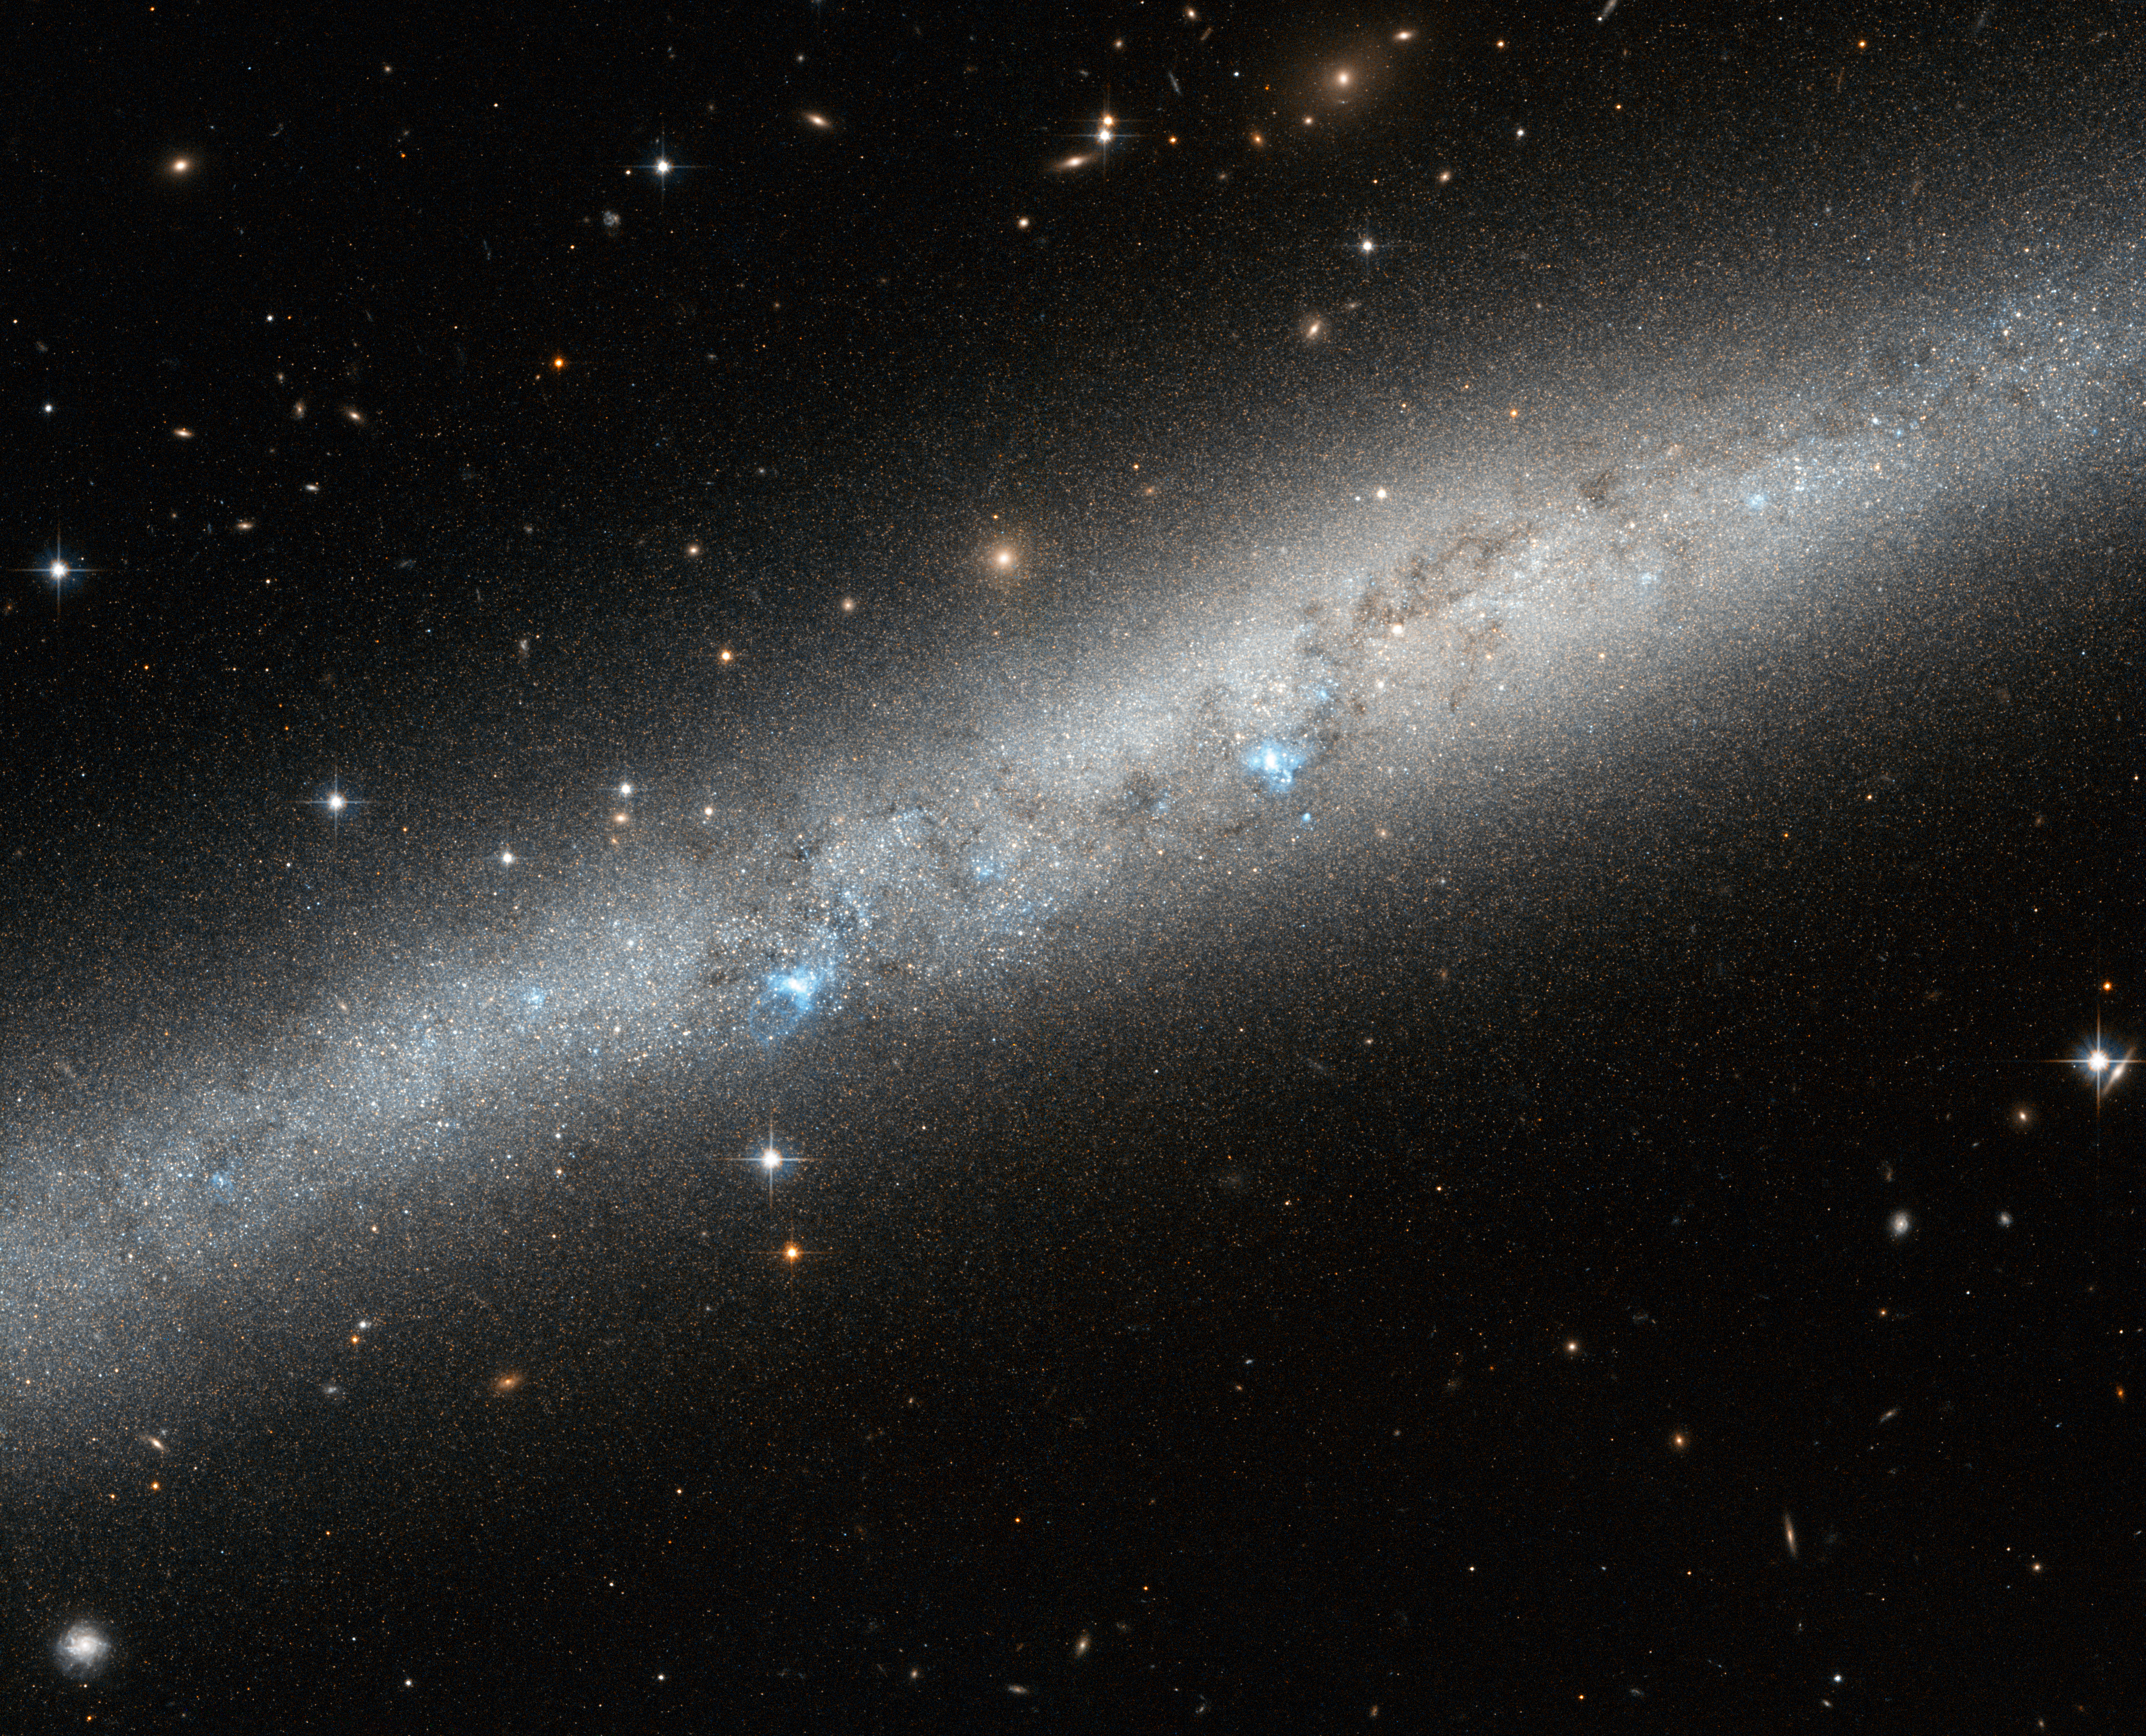

Blue bursts of hot young stars

This image, speckled with blue, white, and yellow light, shows part of the spiral galaxy IC 5052. Surrounded by distant stars and galaxies, it emits a bright blue-white glow which highlights its narrow, intricate structure. It is viewed side-on in the constellation of Pavo (The Peacock), in the southern sky.

When spiral galaxies are viewed from this angle, it is very difficult to fully understand their properties and how they are arranged. IC 5052 is actually a barred spiral galaxy – its pinwheeling arms do not begin from the centre point but are instead attached to either end of a straight "bar" of stars that cuts through the galaxy's middle. Approximately two thirds of all spirals are barred, including the Milky Way.

Bursts of pale blue light are visible across the galaxy's length, partially blocked out by weaving lanes of darker gas and dust. These are pockets of extremely hot newborn stars. The bars present in spirals like IC 5052 are thought to help these formation processes by effectively funnelling material from the swirling arms inwards towards these hot stellar nurseries.

A version of this image was submitted to the Hubble's Hidden Treasures image processing competition by contestant Serge Meunier.

Credit: ESA/Hubble & NASA
Acknowledgement: S. Meunier